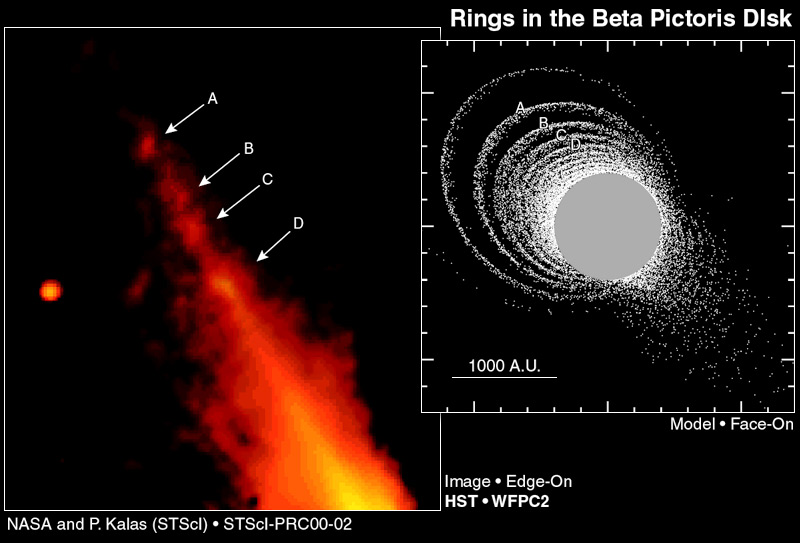

Beta Pictoris Disk Hides Giant Elliptical Ring System (Hubble View and Face On Model)

The planetary dust disk around the star Beta Pictoris is dynamically 'ringing like a bell, ' according to astronomers investigating NASA/ESA Hubble Space Telescope images. The 'clapper' is the gravitational wallop of a star that passed near Beta Pictoris some 100, 000 years ago.

Credit: NASA/ESA and Paul Kalas ( Space Telescope Science Institute)